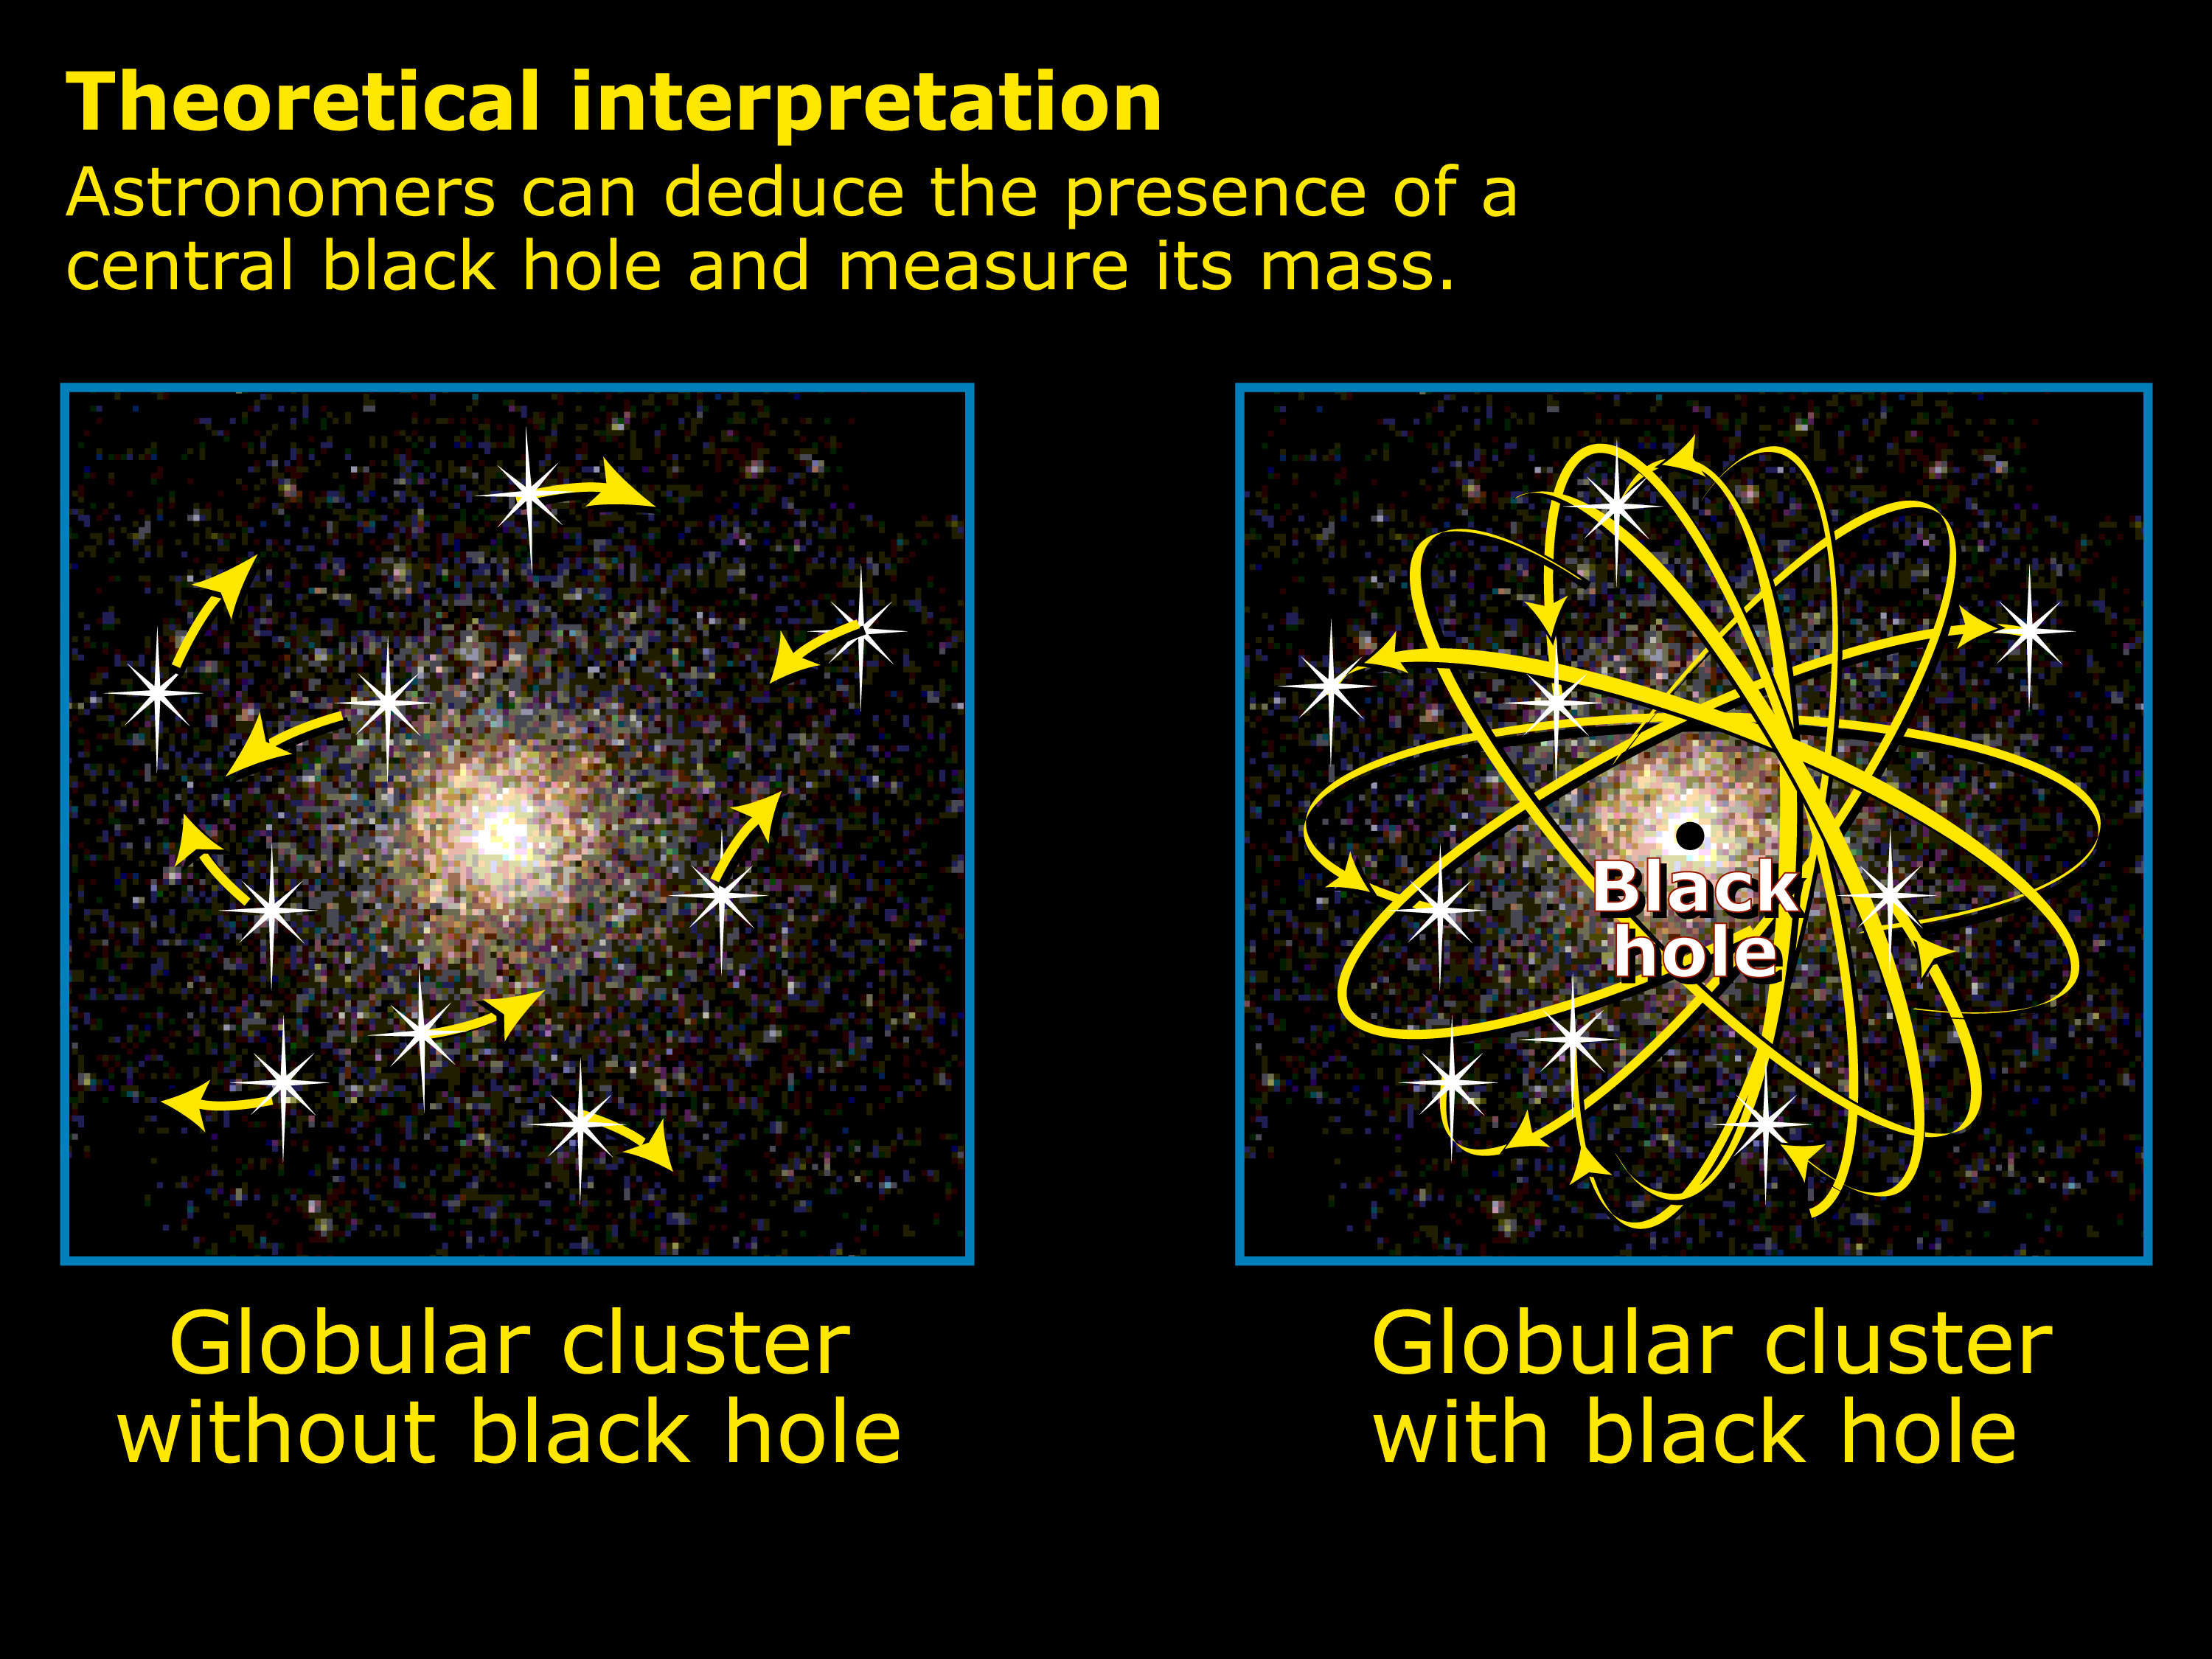

Evidence for existence of a black hole

Medium-size black holes actually do exist, according to the latest findings from NASA's Hubble Space Telescope, but scientists had to look in some unexpected places to find them.

The previously undiscovered black holes provide an important link that sheds light on the way black holes grow. Even more odd, these new black holes were found in the cores of glittering, "beehive" swarms of stars — called globular star clusters — that orbit our Milky Way and other galaxies

Credit: NASA/ESA, A. Feild, and R. Van Der Marel (STScI)